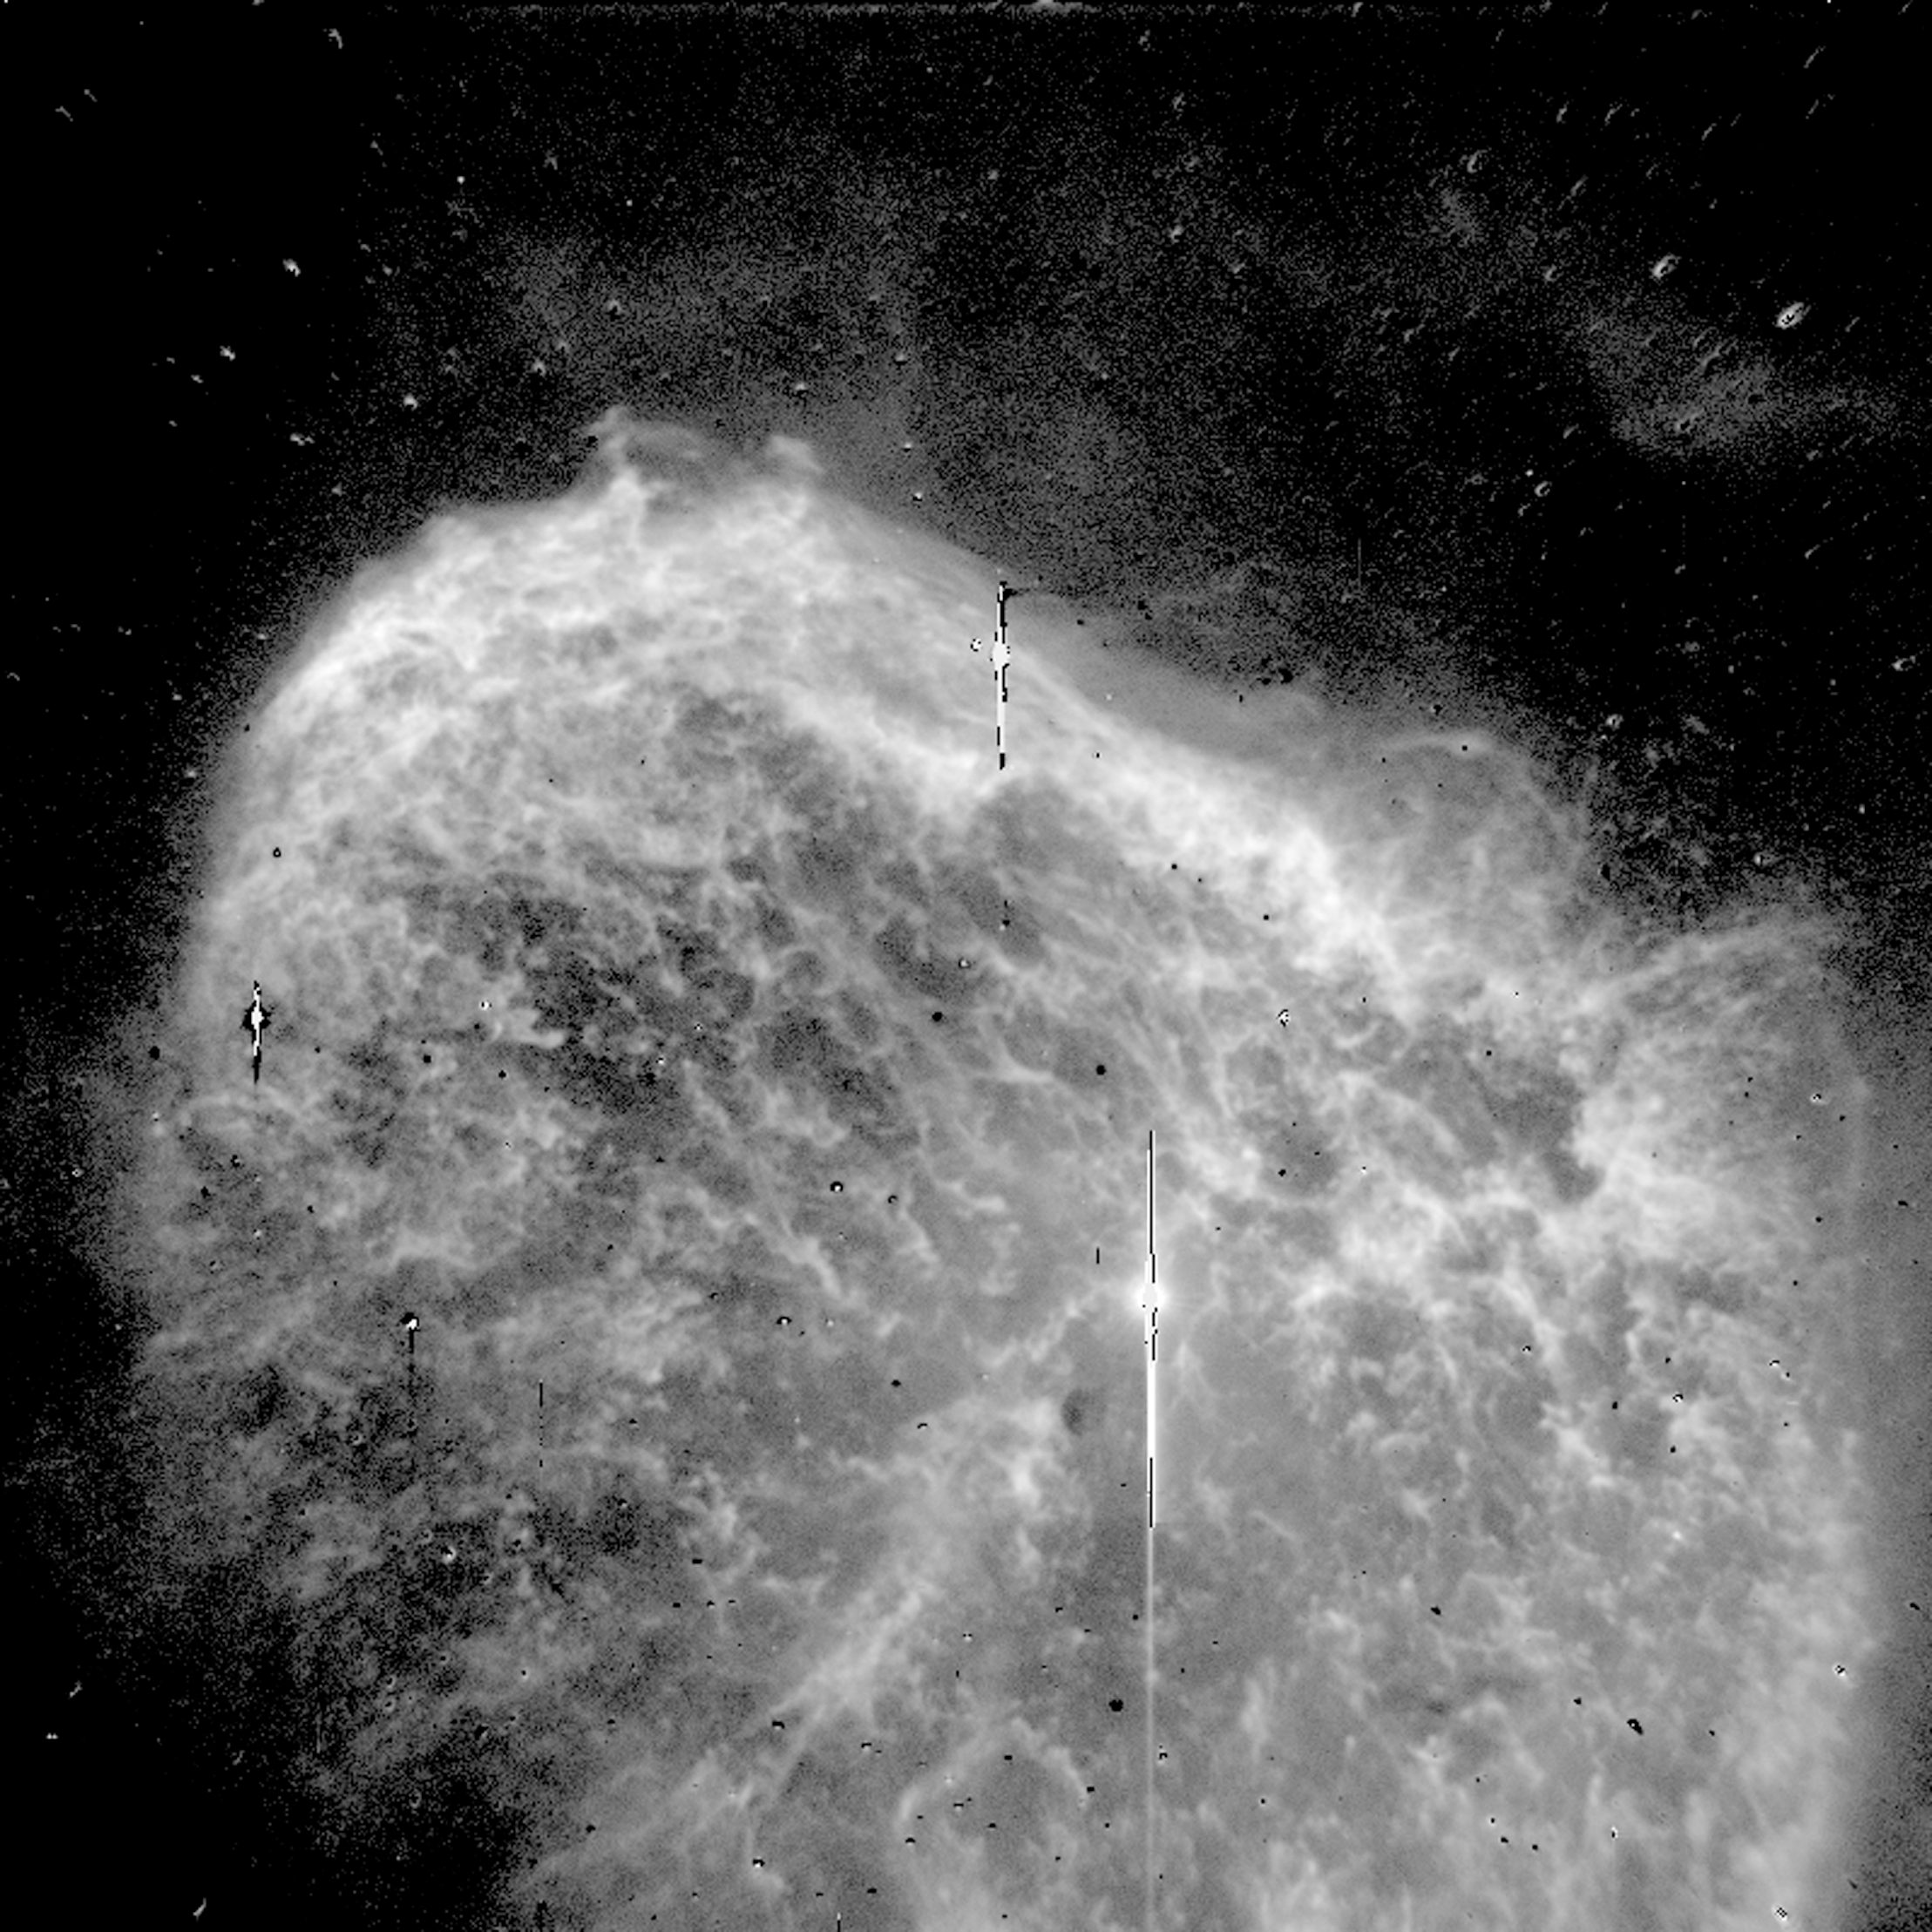

WR 136 - the Star behind the Crescent Nebula

WR 136 created this web of luminous material during the late stages of its life. As a bloated, red super-giant, WR 136 gently puffed away some of its bulk, which settled around it. When the star passed from a super-giant to a Wolf-Rayet, it developed a fierce stellar wind - a stream of charged particles released from its surface - and began expelling mass at a furious rate.

Credit: Brian D. Moore, Jeff Hester, Paul Scowen, Reginald Dufour and NASA/ESA